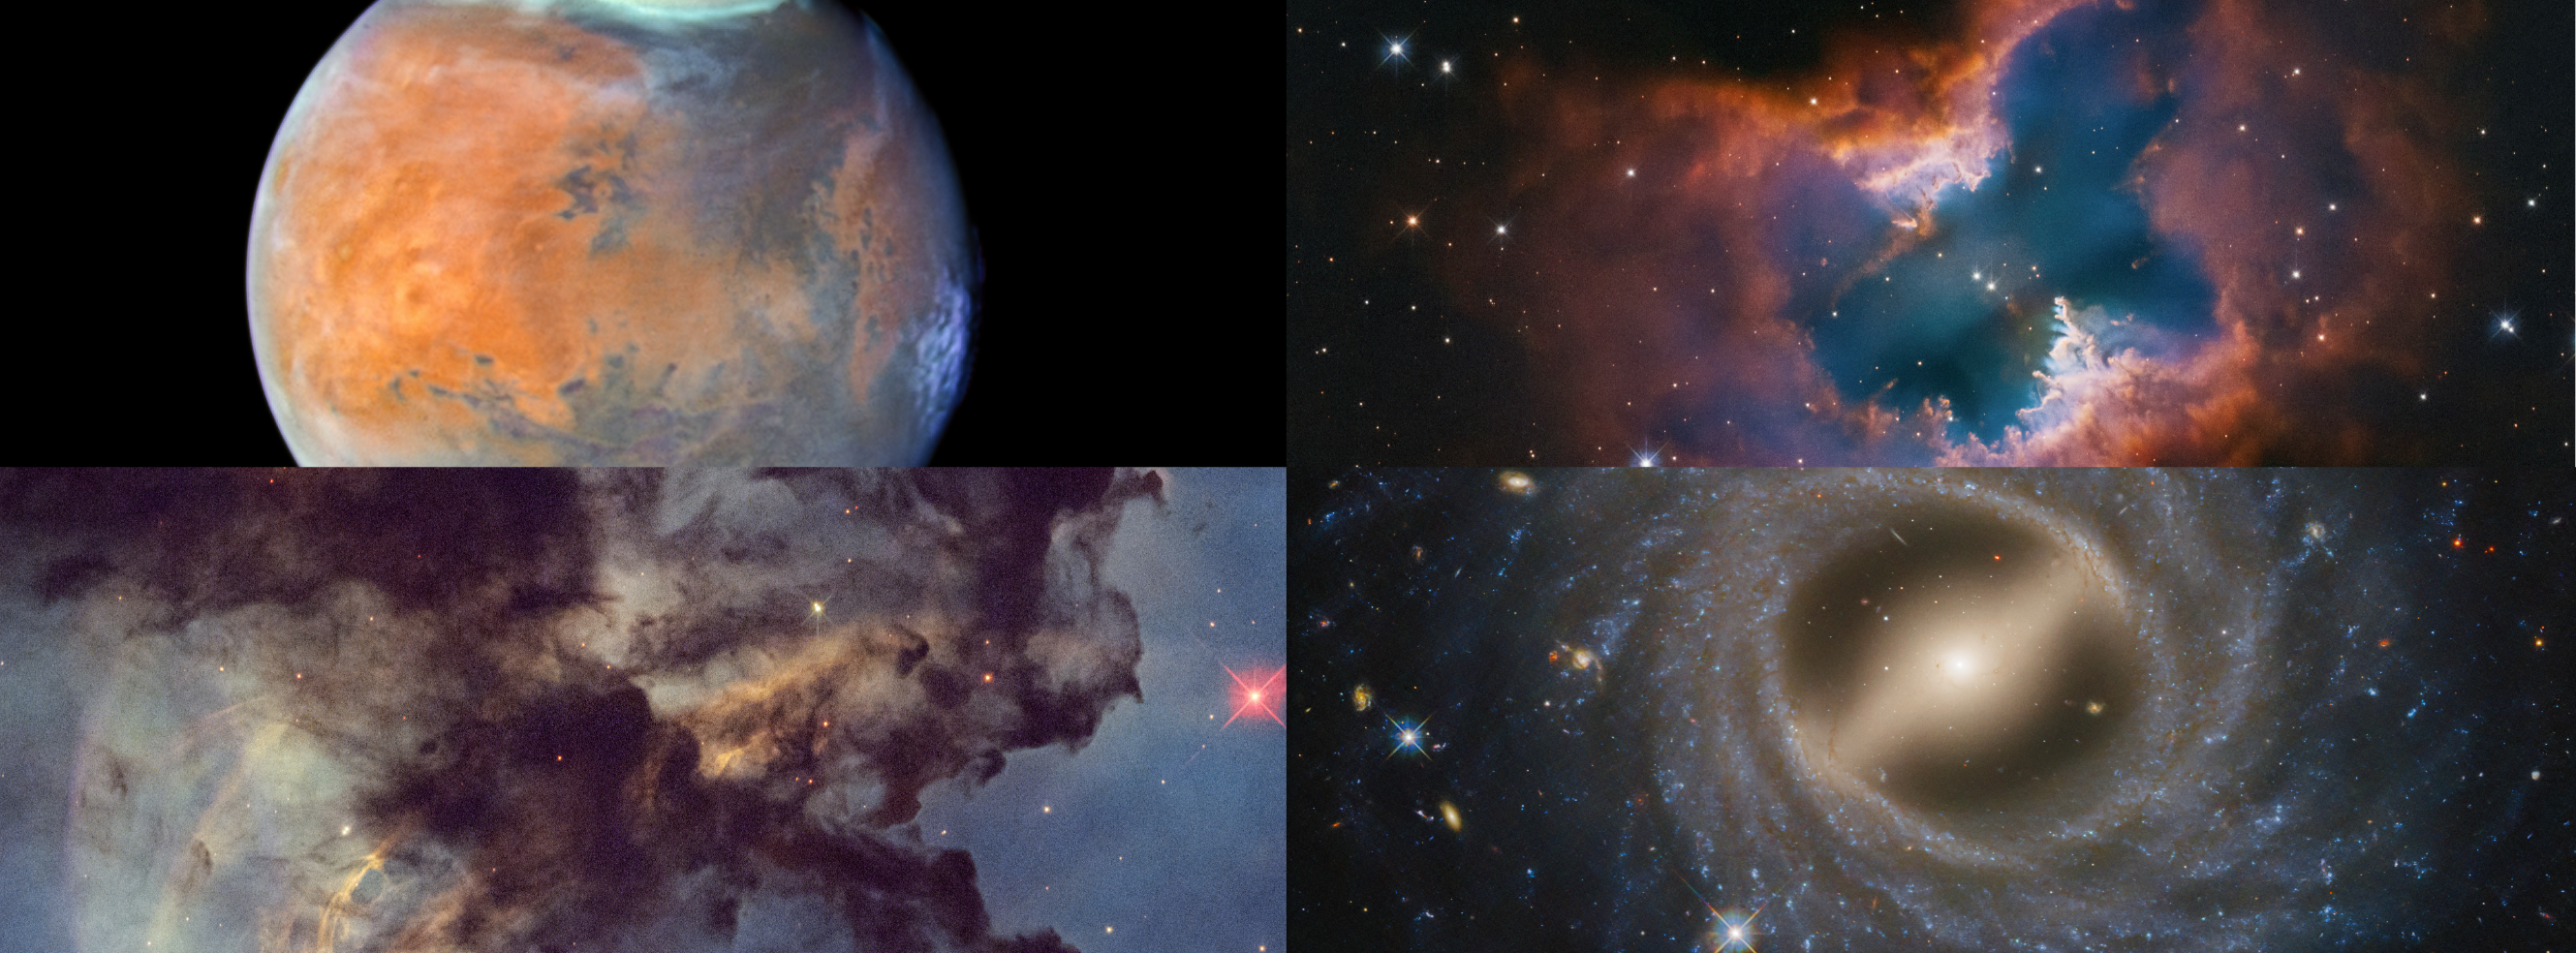

Hubble celebrates 35 years

In celebration of the NASA/ESA Hubble Space Telescope’s 35 years in Earth orbit, an assortment of compelling images have been released today that were recently taken by Hubble:

Upper left: The planet Mars as seen in late December 2024. Thin water-ice clouds, revealed by Hubble’s unique ultraviolet capability, give the Red Planet a frosty appearance.

Upper right: Planetary nebula NGC 2899. This moth-like nebula is sculpted by the outflow of radiation and stellar winds from a dying star – a white dwarf – at the center.

Lower left: The Rosette Nebula. This is a small portion of the huge star-forming region. Dark clouds of hydrogen gas laced with dust are silhouetted across the image.

Lower right: The galaxy NGC 5335, which is a flocculent spiral galaxy with patchy streamers of star formation across its disc. A notable bar structure slices across the center of the galaxy.

Credit: NASA, ESA, STScI